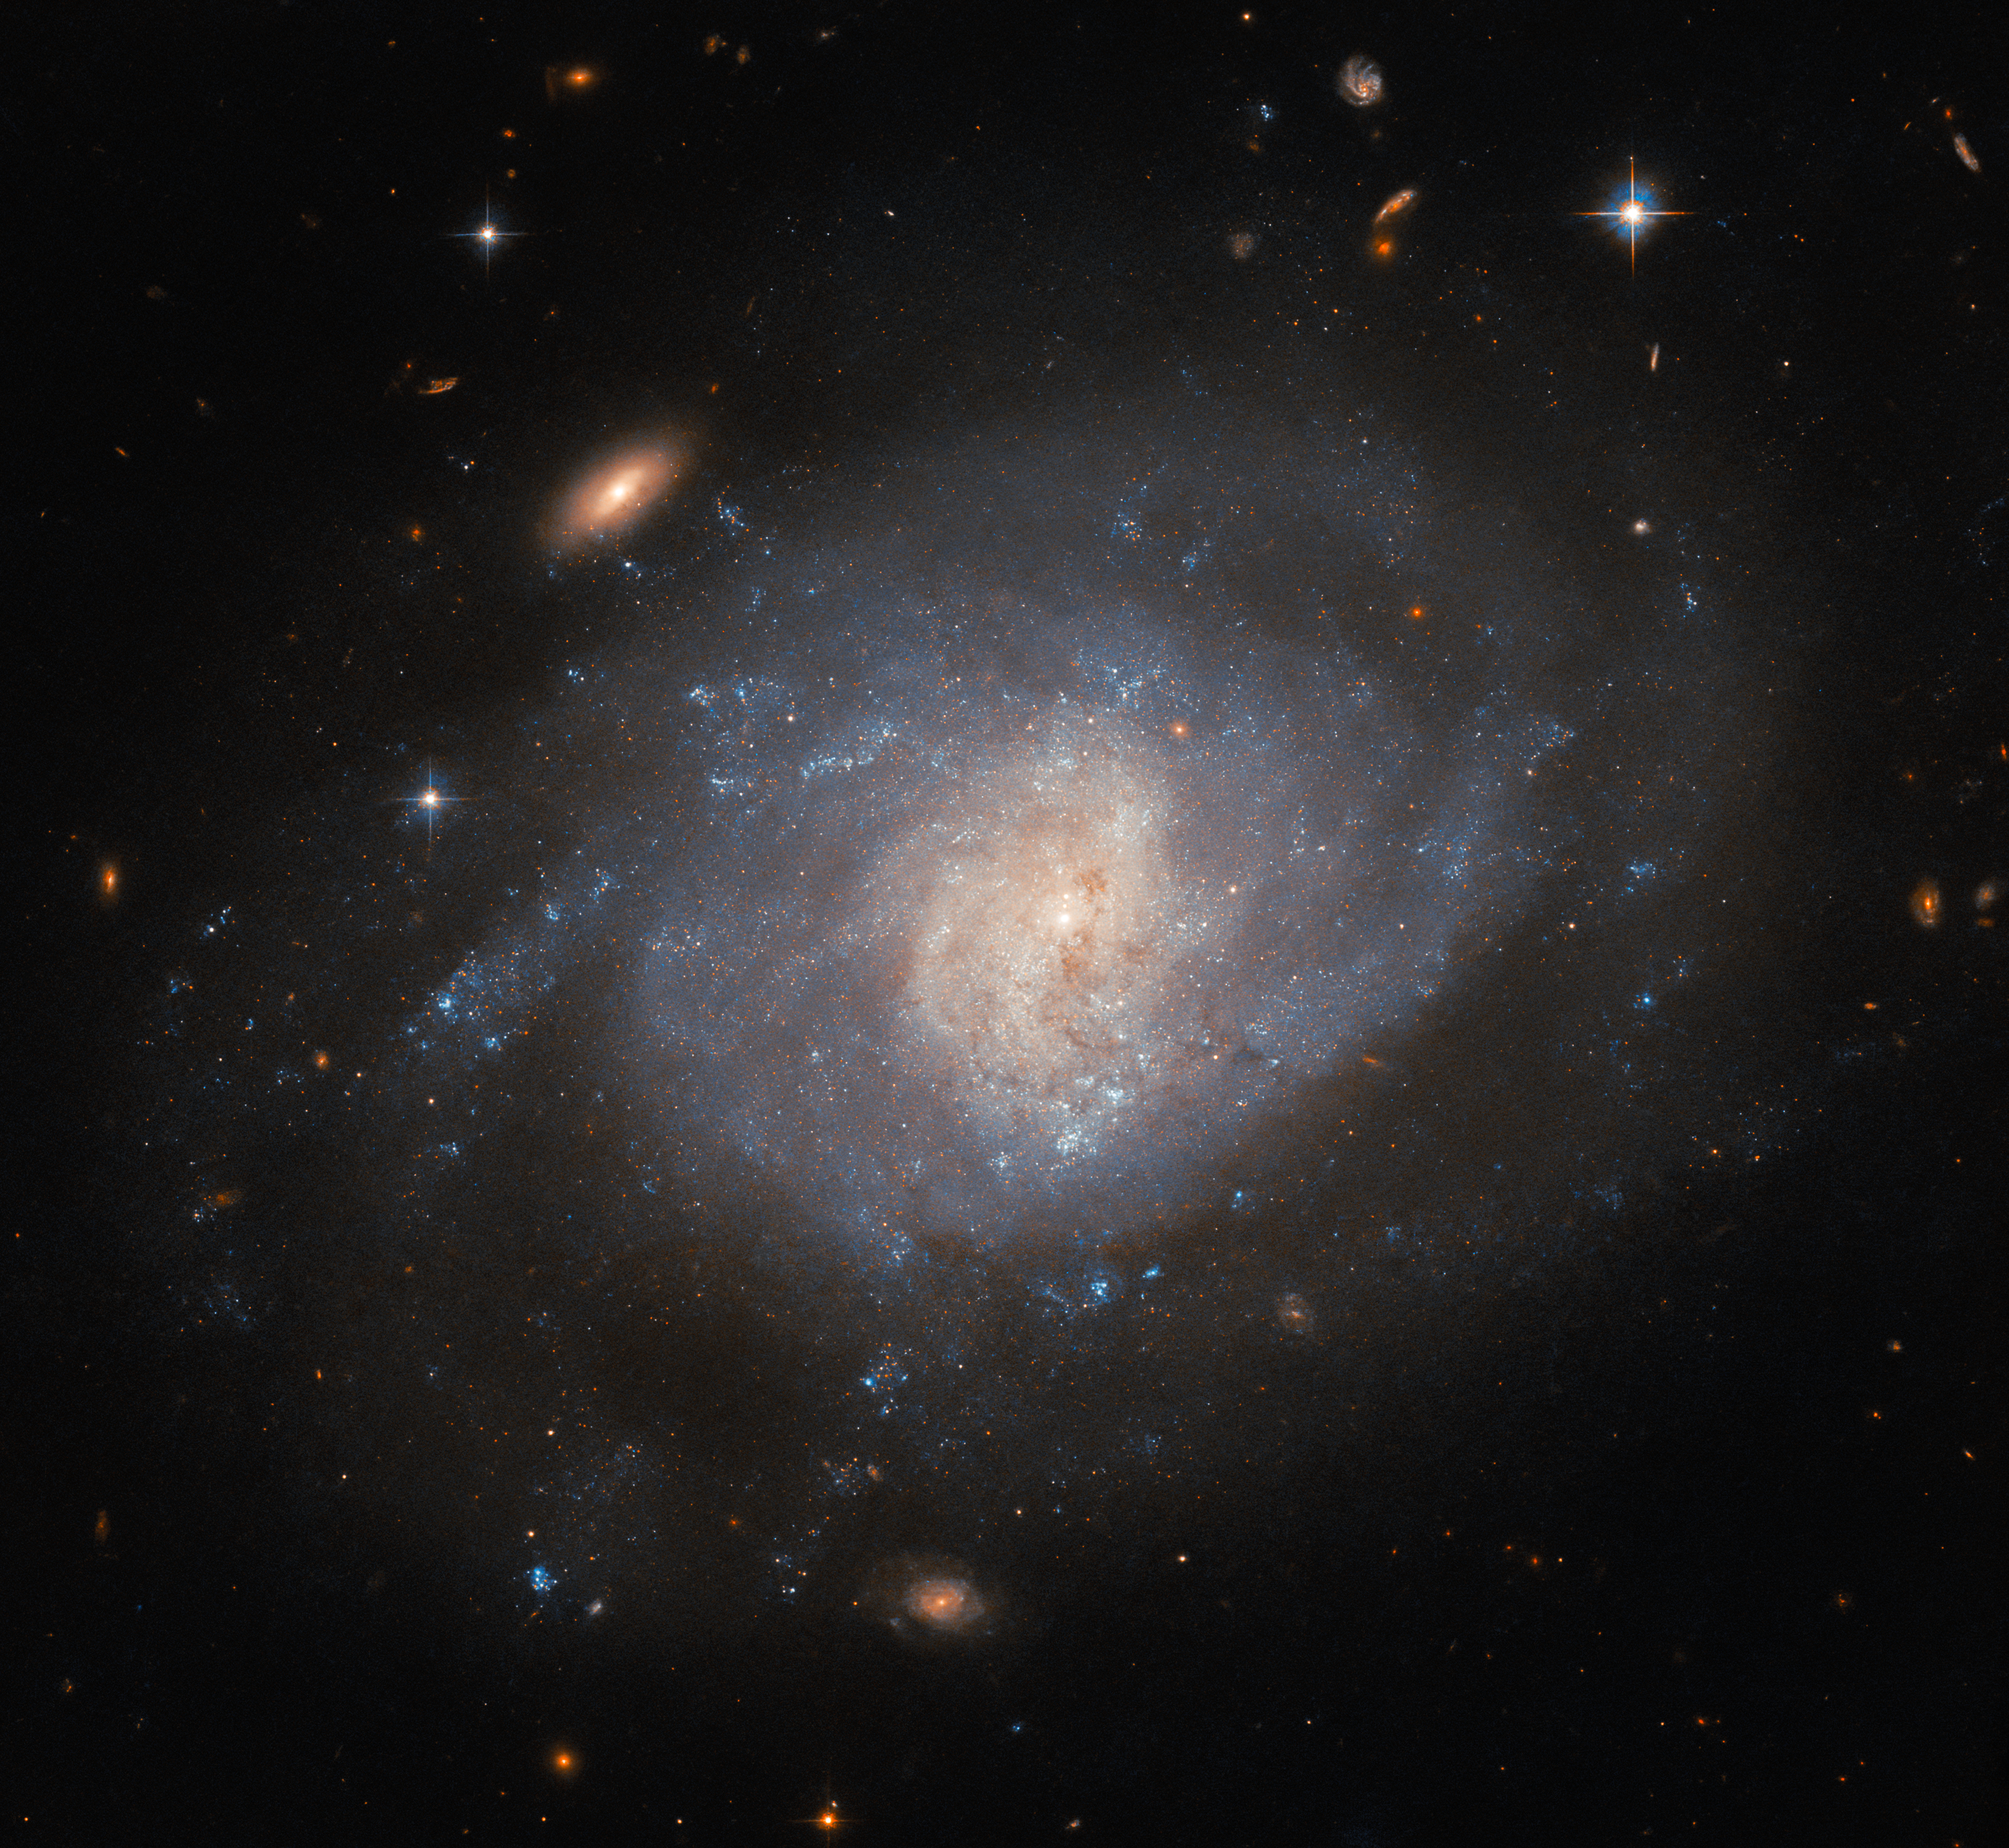

When amateur astronomers point the way

This image features the spiral galaxy NGC 941, which lies about 55 million light-years from Earth. The data used for this image were collected by Hubble’s Advanced Camera for Surveys (ACS). The beautiful NGC 941 is undoubtedly the main attraction in this image; however, this hazy-looking galaxy was not the motivation for the data being collected. That distinction belongs to an astronomical event that took place in the galaxy years before: the supernova SN 2005ad. The location of this faded supernova was observed as part of a study of multiple hydrogen-rich supernovae, also known as type II supernovae, in order to better understand the environments in which certain types of supernovae take place. Whilst the study was conducted by professional astronomers, SN 2005ad itself owes its discovery to a distinguished amateur astronomer named Kōichi Itagaki, who has discovered over 170 supernovae.

This might raise the question of how an amateur astronomer could spot something like a supernova event before professional astronomers — who have access to telescopes such as Hubble. The answer is in part that the detection of supernovae is a mixture of skill, facilities and luck. Most astronomical events happen over time spans that dwarf human lifetimes, but supernova explosions are extraordinarily fast, appearing very suddenly and then brightening and dimming over a period of days or weeks. Another aspect is that professional astronomers often do not spend that much time actually observing. There is a great deal of competition for time on telescopes such as Hubble, and then data from a few hours of observations might take weeks, months, or sometimes even years to process and analyse to their full potential. Amateur astronomers can spend much more time actually observing the skies, and sometimes have extremely impressive systems of telescopes, computers and software that they can put to use.

So many supernovae are spotted by skilful amateurs such as Itagaki that there is actually an online system set up for reporting them (the Transient Name Server). This is a big help to professional astronomers, because with supernova events time is truly of the essence. After the discovery of SN 2005ab was reported, professional astronomers were able to follow up with spectroscopic studies and confirm it as a type II supernova, which eventually led to its location being included in this study with Hubble. Such a study wouldn’t be possible without a rich library of previous supernovae, built with the keen eyes of amateur astronomers.

Credit: ESA/Hubble & NASA, C. Kilpatrick